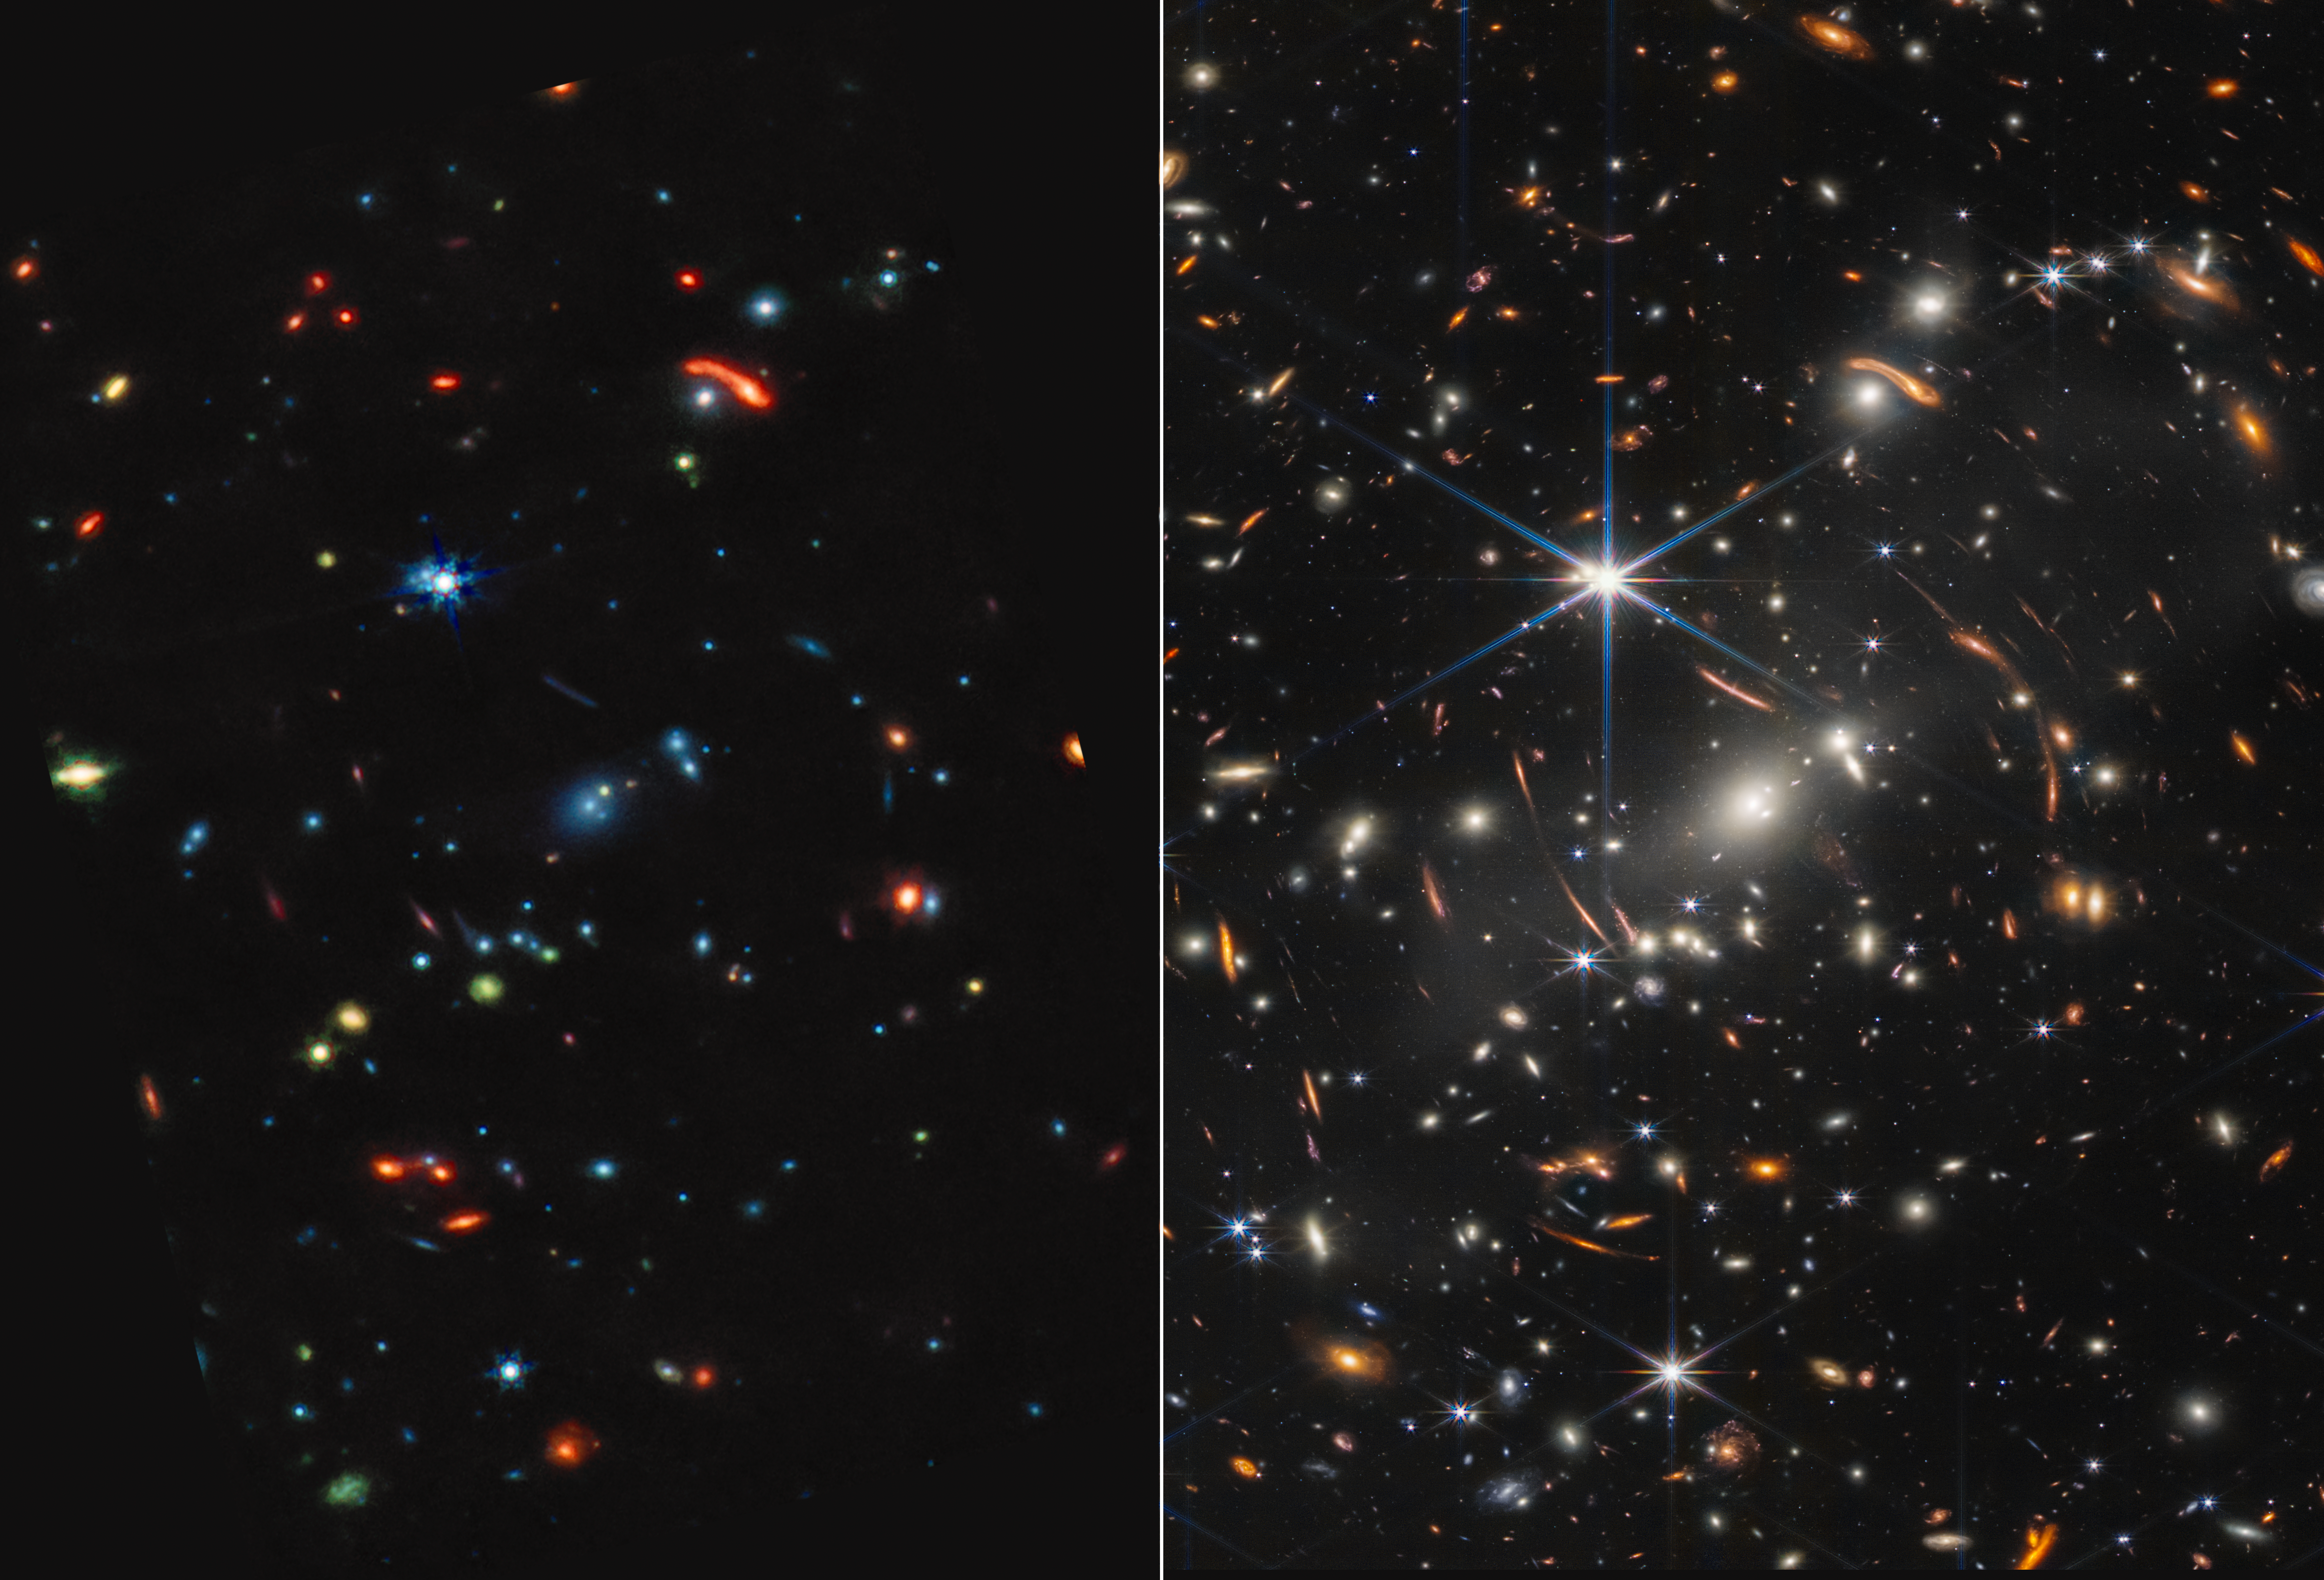

Webb’s First Deep Field (MIRI and NIRCam Images Side by Side)

Galaxy cluster SMACS 0723 is a technicolour landscape when viewed in mid-infrared light by the NASA/ESA/CSA James Webb Space Telescope. Compared to Webb’s near-infrared image at right, the galaxies and stars are awash in new colours.

Start by comparing the largest bright blue star. At right, it has very long diffraction spikes, but in mid-infrared at left, its smaller points appear more like a snowflake’s. Find more stars by looking for these telltale – if tiny – spikes. Stars also appear yellow, sometimes with green diffraction spikes.

If an object is blue and lacks spikes, it’s a galaxy. These galaxies contain stars, but very little dust. This means that their stars are older – there is less gas and dust available to condense to form new stars. It also means their stars are ageing.

The red objects in this field are enshrouded in thick layers of dust, and may very well be distant galaxies. Some may be stars, but research is needed to fully identify each object in the mid-infrared image.

The prominent arcs at the centre of the galaxy cluster, which are galaxies that are stretched and magnified by gravitational lensing, appear blue in the Mid-Infrared Instrument (MIRI) image at left and orange in the Near-Infrared Camera (NIRCam) image at right. These galaxies are older and have much less dust.

Galaxies’ sizes in both images offer clues as to how distant they may be – the smaller the object, the more distant it is. In mid-infrared light, galaxies that are closer appear whiter.

Among this kaleidoscope of colours in the MIRI image, green is the most tantalising. Green indicates a galaxy’s dust includes a mix of hydrocarbons and other chemical compounds.

The differences in Webb’s images are owed to the technical capabilities of the MIRI and NIRCam instruments. MIRI captures mid-infrared light, which highlights where the dust is. Dust is a major ingredient for star formation. Stars are brighter at shorter wavelengths, which is why they appear with prominent diffraction spikes in the NIRCam image.

With Webb’s mid-infrared data, researchers will soon be able to add much more precise calculations of dust quantities in stars and galaxies to their models, and begin to more clearly understand how galaxies at any distance form and change over time.

For a full array of Webb’s first images and spectra, including downloadable files, please visit: https://esawebb.org/initiatives/webbs-first-images/

NIRCam was built by a team at the University of Arizona and Lockheed Martin’s Advanced Technology Center.

MIRI was contributed by ESA and NASA, with the instrument designed and built by a consortium of nationally funded European Institutes (The MIRI European Consortium) in partnership with JPL and the University of Arizona.

Credit: NASA, ESA, CSA, STScI, Webb ERO Production Team